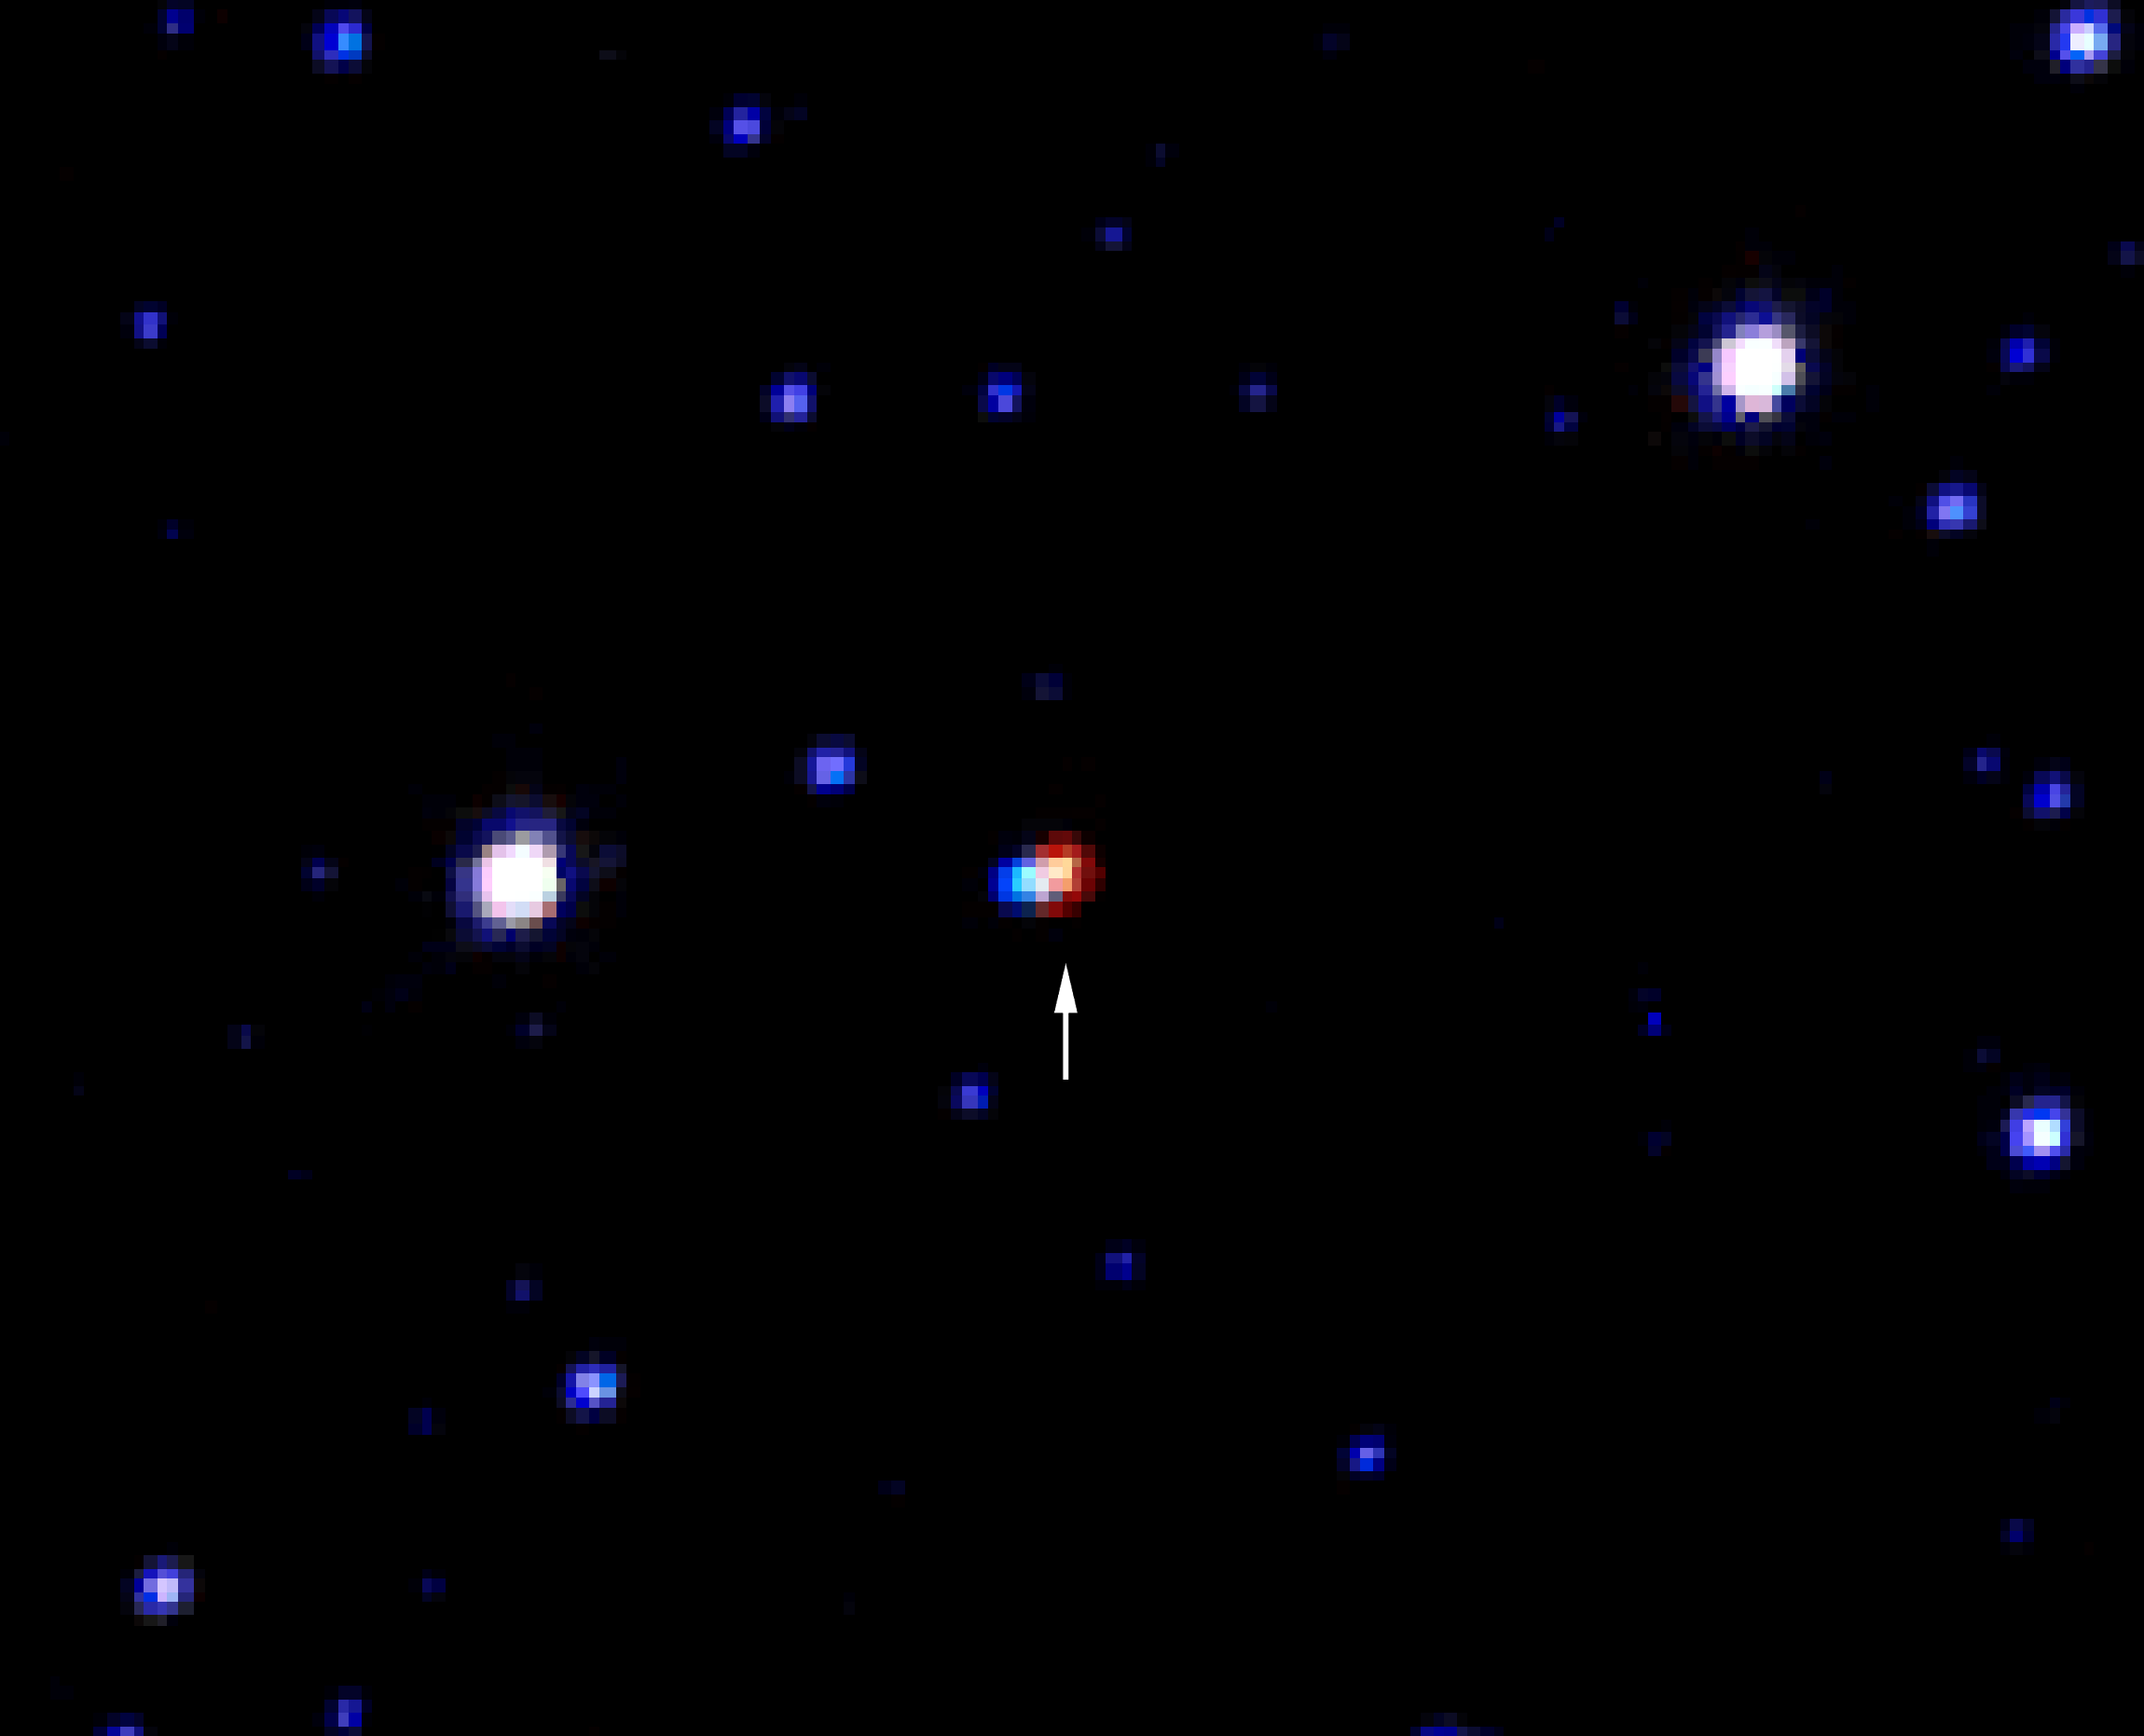

First image and spectrum of a Dark Matter object [heic0116]

This NASA/ESA Hubble Space Telescope image is based on three exposures from the WFPC2 camera at the NASA/ESA Hubble Space Telescope, obtained in the V-, R- and I-bands, (shown as blue, green and red respectively). It shows the first image of a Dark Matter object - a MACHO (a massive compact object). It is the red object that is indicated with an arrow. This MACHO is a nearby red dwarf star that gravitationally focused light from a blue background star in another galaxy in a so-called microlensing event. Since the event six years ago, the MACHO has moved 0.134 arc-seconds on the sky and can now be clearly separated from the blue star in the Hubble image.

Credit: European Space Agency, European Southern Observatory and the MACHO project team